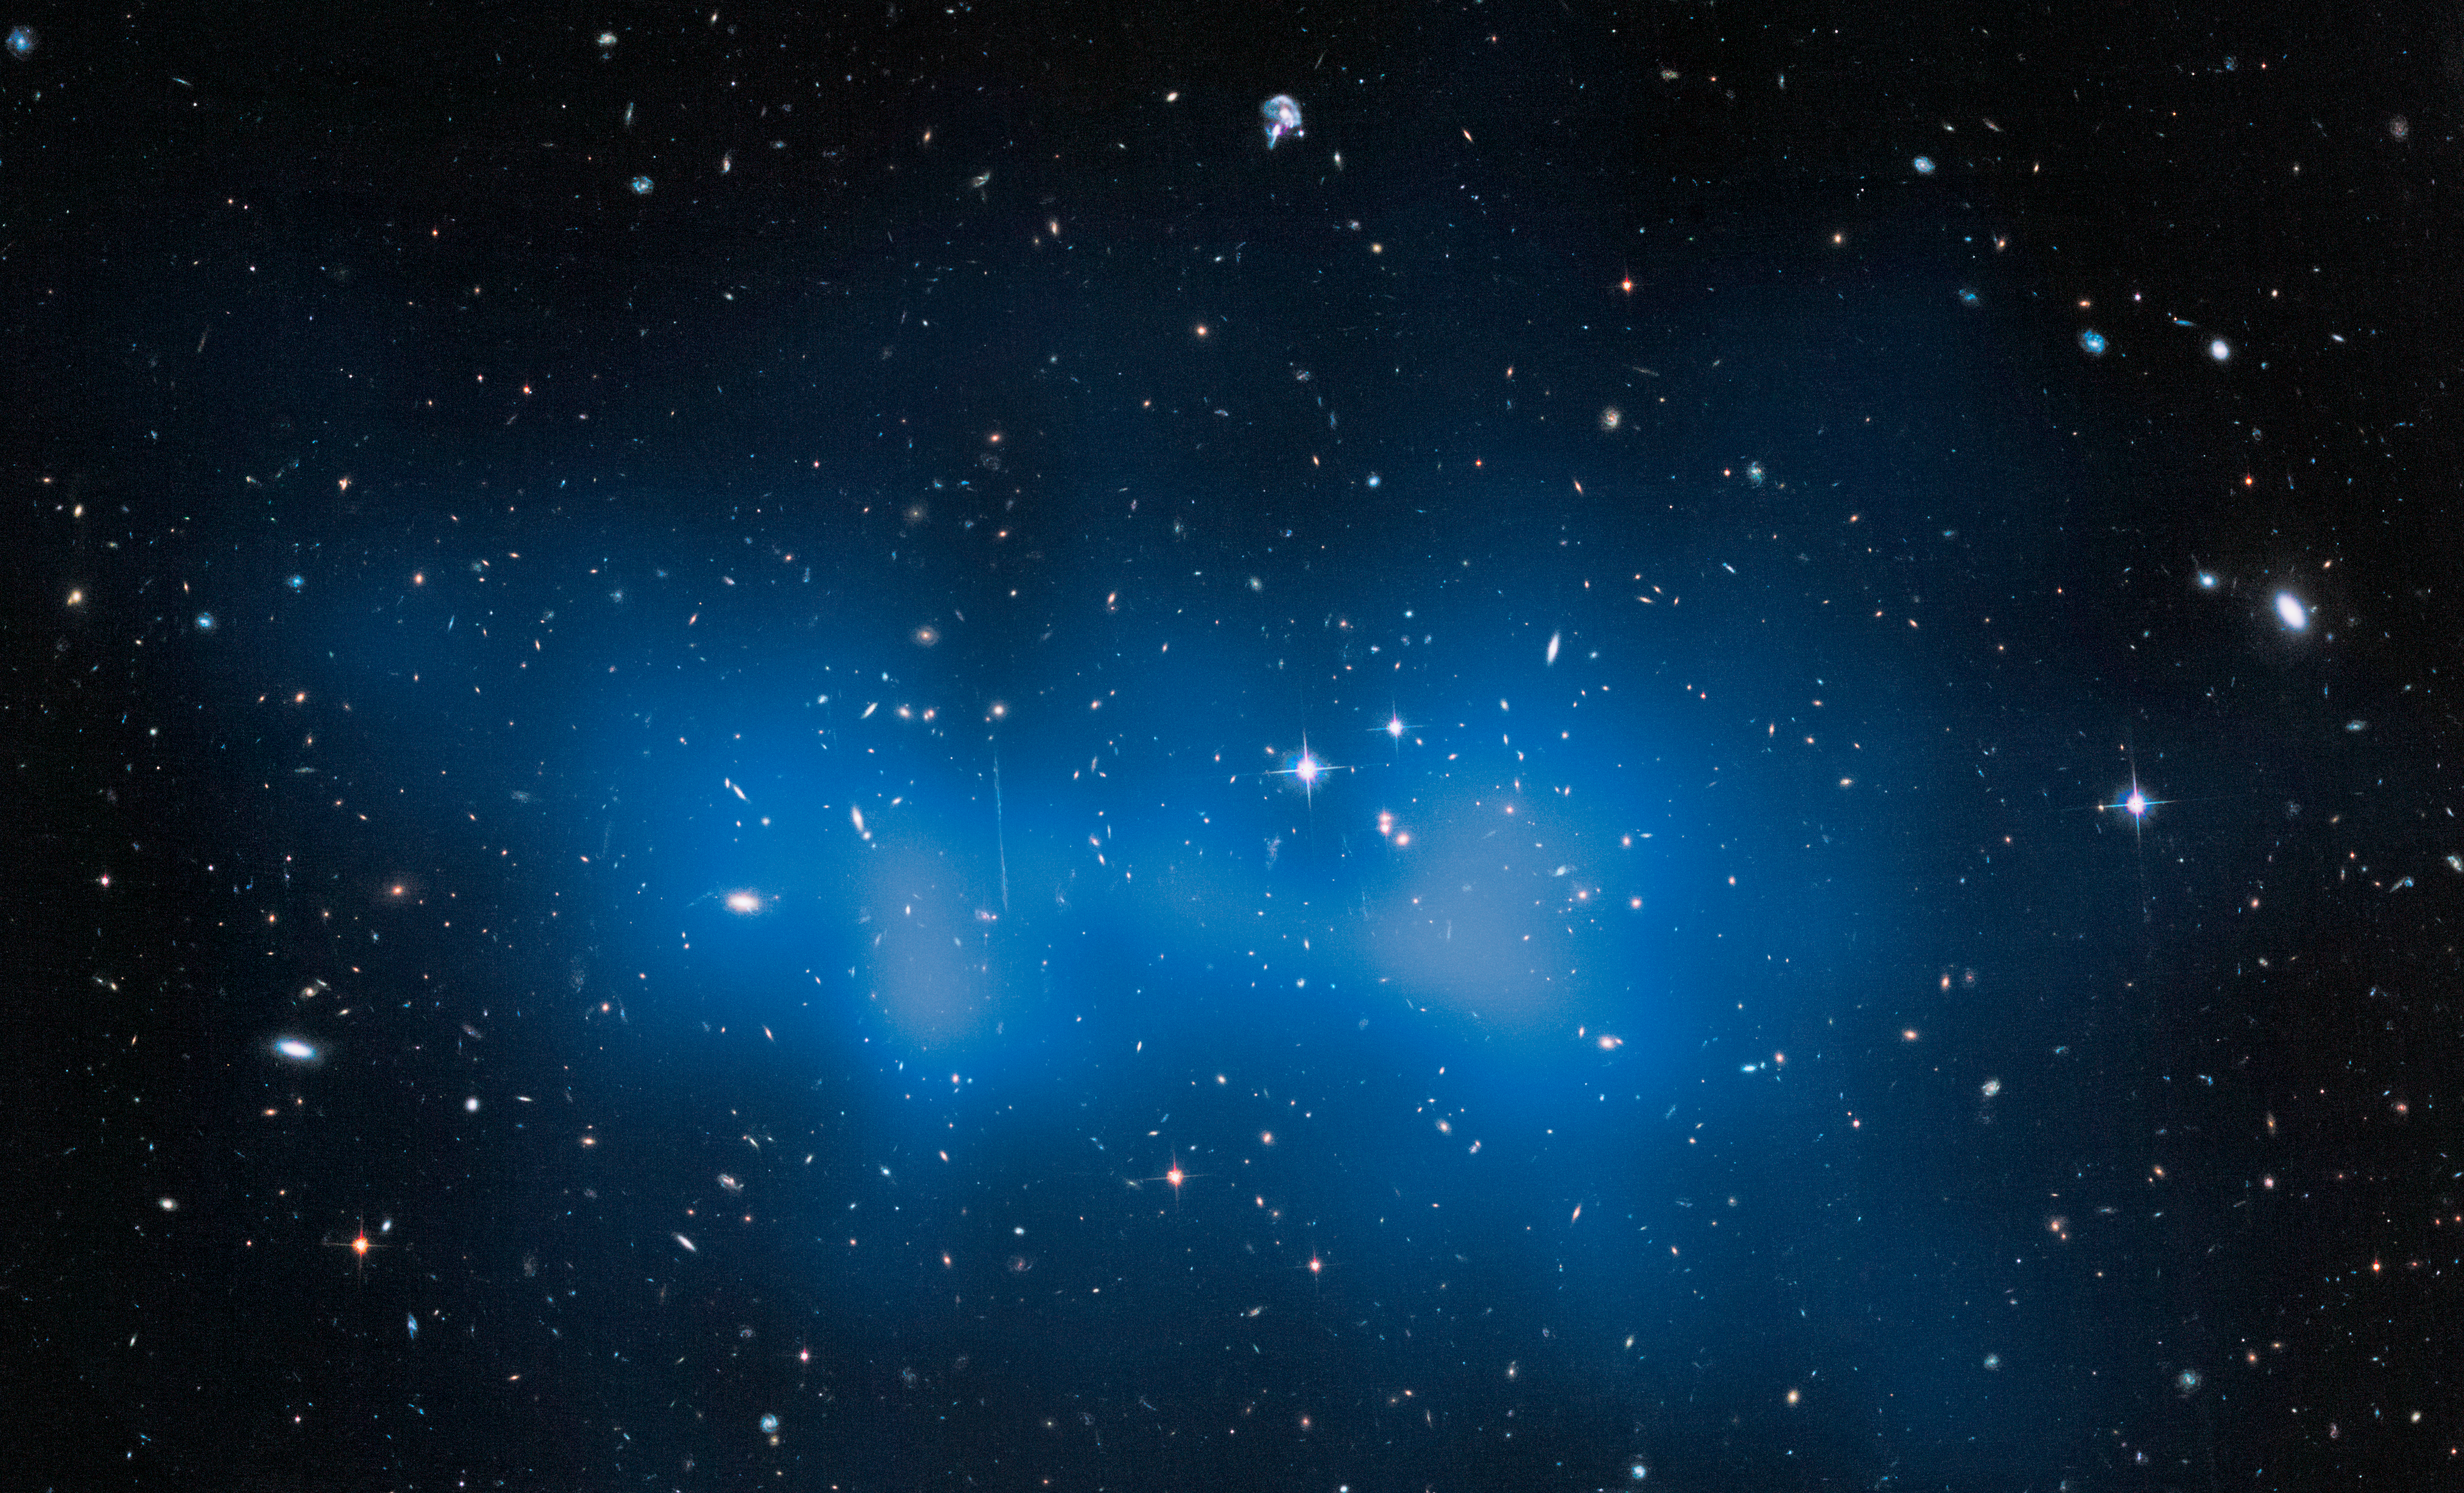

Hubble weighs “the fat one”

When astronomical objects are named, astronomers like to pick out notable features for inspiration — for example, the Whirlpool Galaxy with its pinwheeling arms, or the Needle Galaxy, which appears as a long, thin streak of silver across the sky.

This image shows a galaxy cluster known as El Gordo, or “the fat one”, a very distant object that lies some ten billion light-years away from us. This grouping of galaxies certainly lives up to its nickname; it is the largest known galaxy cluster in the distant Universe and contains several hundred galaxies. What’s more, new NASA/ESA Hubble Space Telescope observations show that it is actually some 43 percent heavier than previously thought, with a mass some three million billion times the mass of the Sun — which is 3000 times the mass of our own galaxy, the Milky Way.

A small fraction of the cluster’s immense mass is locked up in the galaxies that inhabit it, and a larger fraction is held in hot gas that fills its entire volume, but the majority is made up of the infamous, and invisible, dark matter. The location of this dark matter is mapped out in the blue overlay. Although galaxy clusters as massive as this do exist in the nearby Universe, for example the Bullet Cluster, nothing like this has ever been seen to exist so far back in time, when the Universe was roughly half of its current age of 13.8 billion years.

Astronomers previously weighed El Gordo back in January 2012, studying the unusual cluster’s appearance and dynamics in the X-ray part of the spectrum. This new Hubble study instead analysed how the huge cluster affected the space around it to get an idea of its mass. Large clumps of mass warp space and distort the view of more distant objects. This process, known as gravitational lensing, allows astronomers to estimate the mass of the clumps that are causing this distortion.

Credit: NASA, ESA, J. Jee (University of California, Riverside, USA)